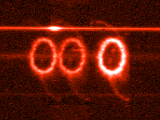

STIS chemically analyzes the ring around SN 1987a

These images from the Hubble's Space Telescope Imaging Spectrograph (STIS) provide a new and unprecedented look at one of the most unique and complex structures in the universe -- a light-year wide ring of glowing gas around supernova 1987A, the nearest stellar explosion in 400 years, which occurred in February 1987.

Credit: George Sonneborn (GSFC) and NASA/ESA